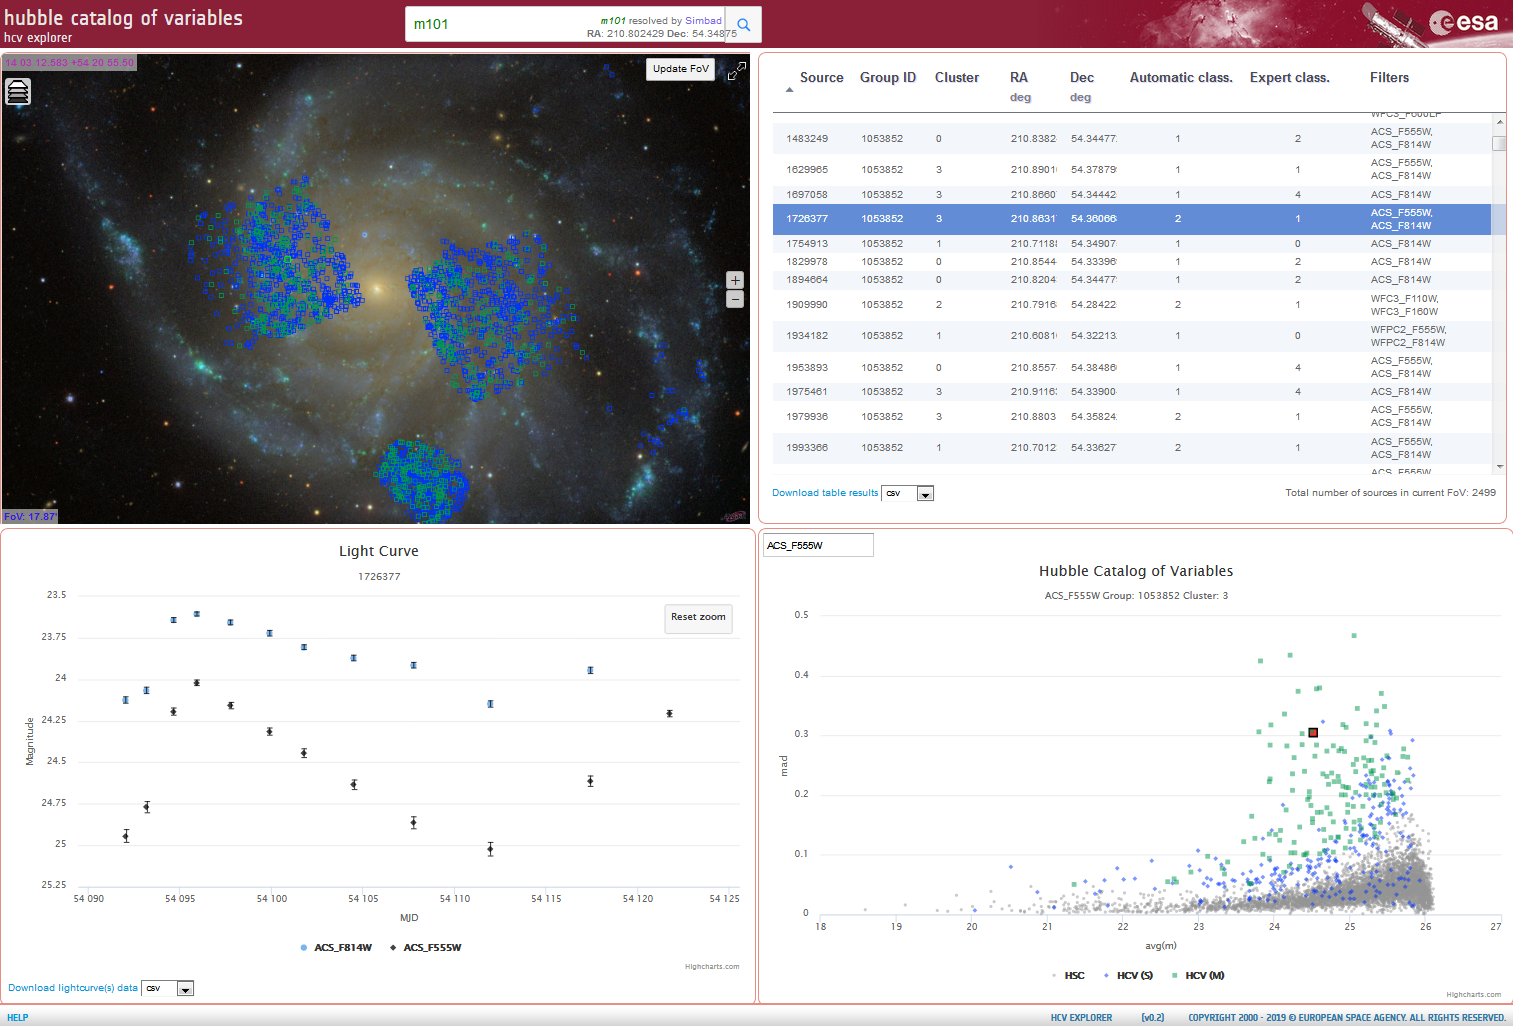

HCV Explorer Tool

This is a preliminary rendering of the HCV Explorer tool. The sky is centred on M101 (top left), and the background image is from the SDSS. The green sources are Multiple Filter Candidate Variables, and the blue sources are Single Filter Candidate Variables. The highlighted source is MatchID: 1726377, a Cepheid in M101. The top right shows the results table from the HCV; the bottom left shows the light curve for the Cepheid (zoomed in from MJD 54090 to 54125) for the filters ACS_F814W (blue) and ACS_F555W (black). The bottom right shows a plot of average magnitude versus the median absolute deviation in the magnitude: green sources are Multiple Filter Candidate Variables, blue sources are Single Filter Candidate Variables and grey sources are the HSC sources all for the filter ACS_F555W, in that particular group and cluster (Group ID = 1053852 and Cluster ID = 3).

Credit: Jeffrey Newman (Univ. of California at Berkeley) and NASA/ESA